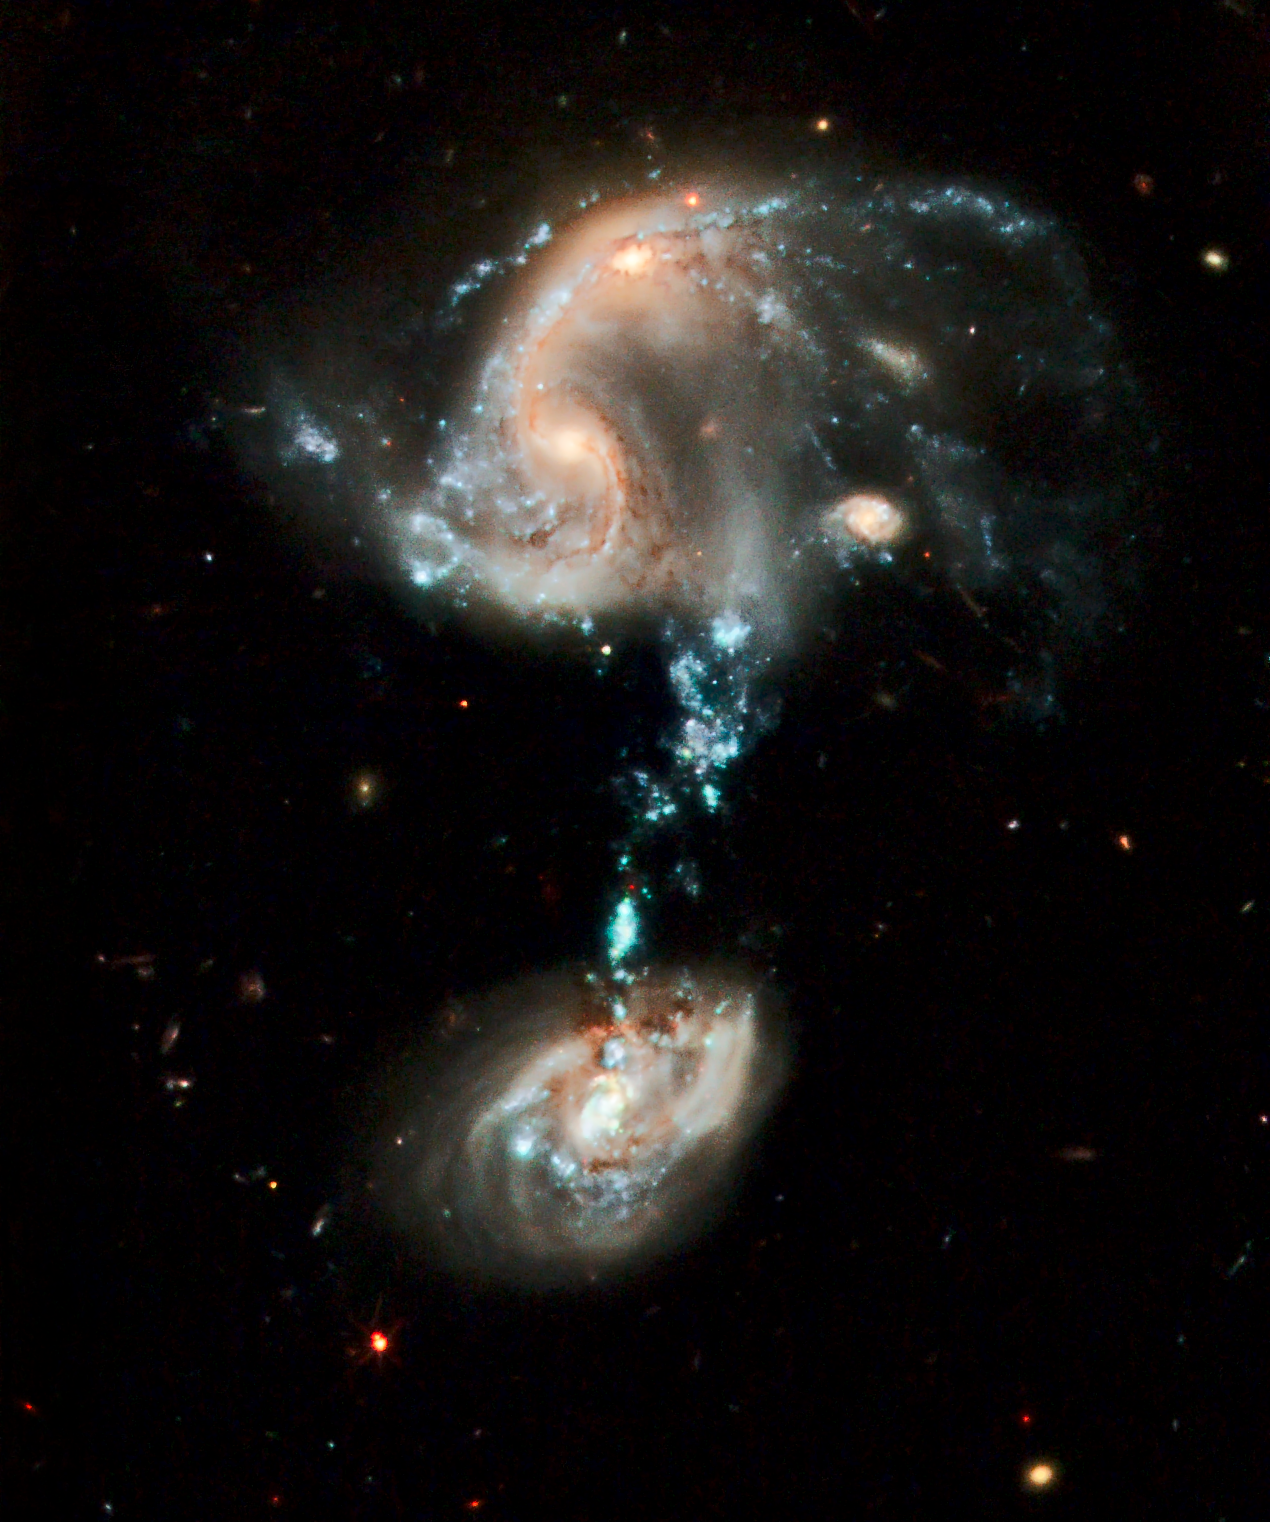

Hubble celebrates 19th anniversary with fountain of youth

This brilliant image, courtesy of NASA/ESA's Hubble Space Telescope, is a fitting 19th anniversary tribute to the workhorse space observatory.

This interacting group contains several galaxies, along with a "cosmic fountain" of stars, gas and dust that stretches over 100 000 light-years. Resembling a pair of owl's eyes, the two nuclei of the colliding galaxies can be seen in the process of merging at the upper left. The bizarre blue bridge of material extending out from the northern component looks as if it connects to a third galaxy but in reality the galaxy is in the background and not connected at all. The blue "fountain" is the most striking feature of this galaxy troupe and it contains complexes of super star clusters that may have as many as dozens of individual young star clusters in them.

Credit: NASA, ESA and the Hubble Heritage Team (STScI/AURA)